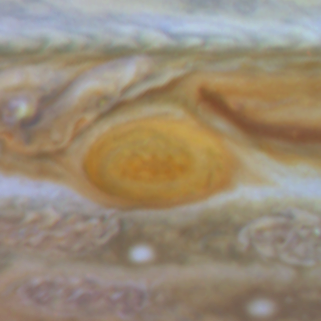

Jupiter's Great Red Spot

When 17th-century astronomers first turned their telescopes to Jupiter, they noted a conspicuous reddish spot on the giant planet. This Great Red Spot is still present in Jupiter's atmosphere, more than 300 years later. It is now known that it is a vast storm, spinning like a cyclone. Unlike a low-pressure hurricane in the Caribbean Sea, however, the Red Spot rotates in a counterclockwise direction in the southern hemisphere, showing that it is a high-pressure system. Winds inside this Jovian storm reach speeds of about 270 mph.

Credit: Hubble Heritage Team (STScI/AURA/NASA/ESA) and Amy Simon (Cornell U.)